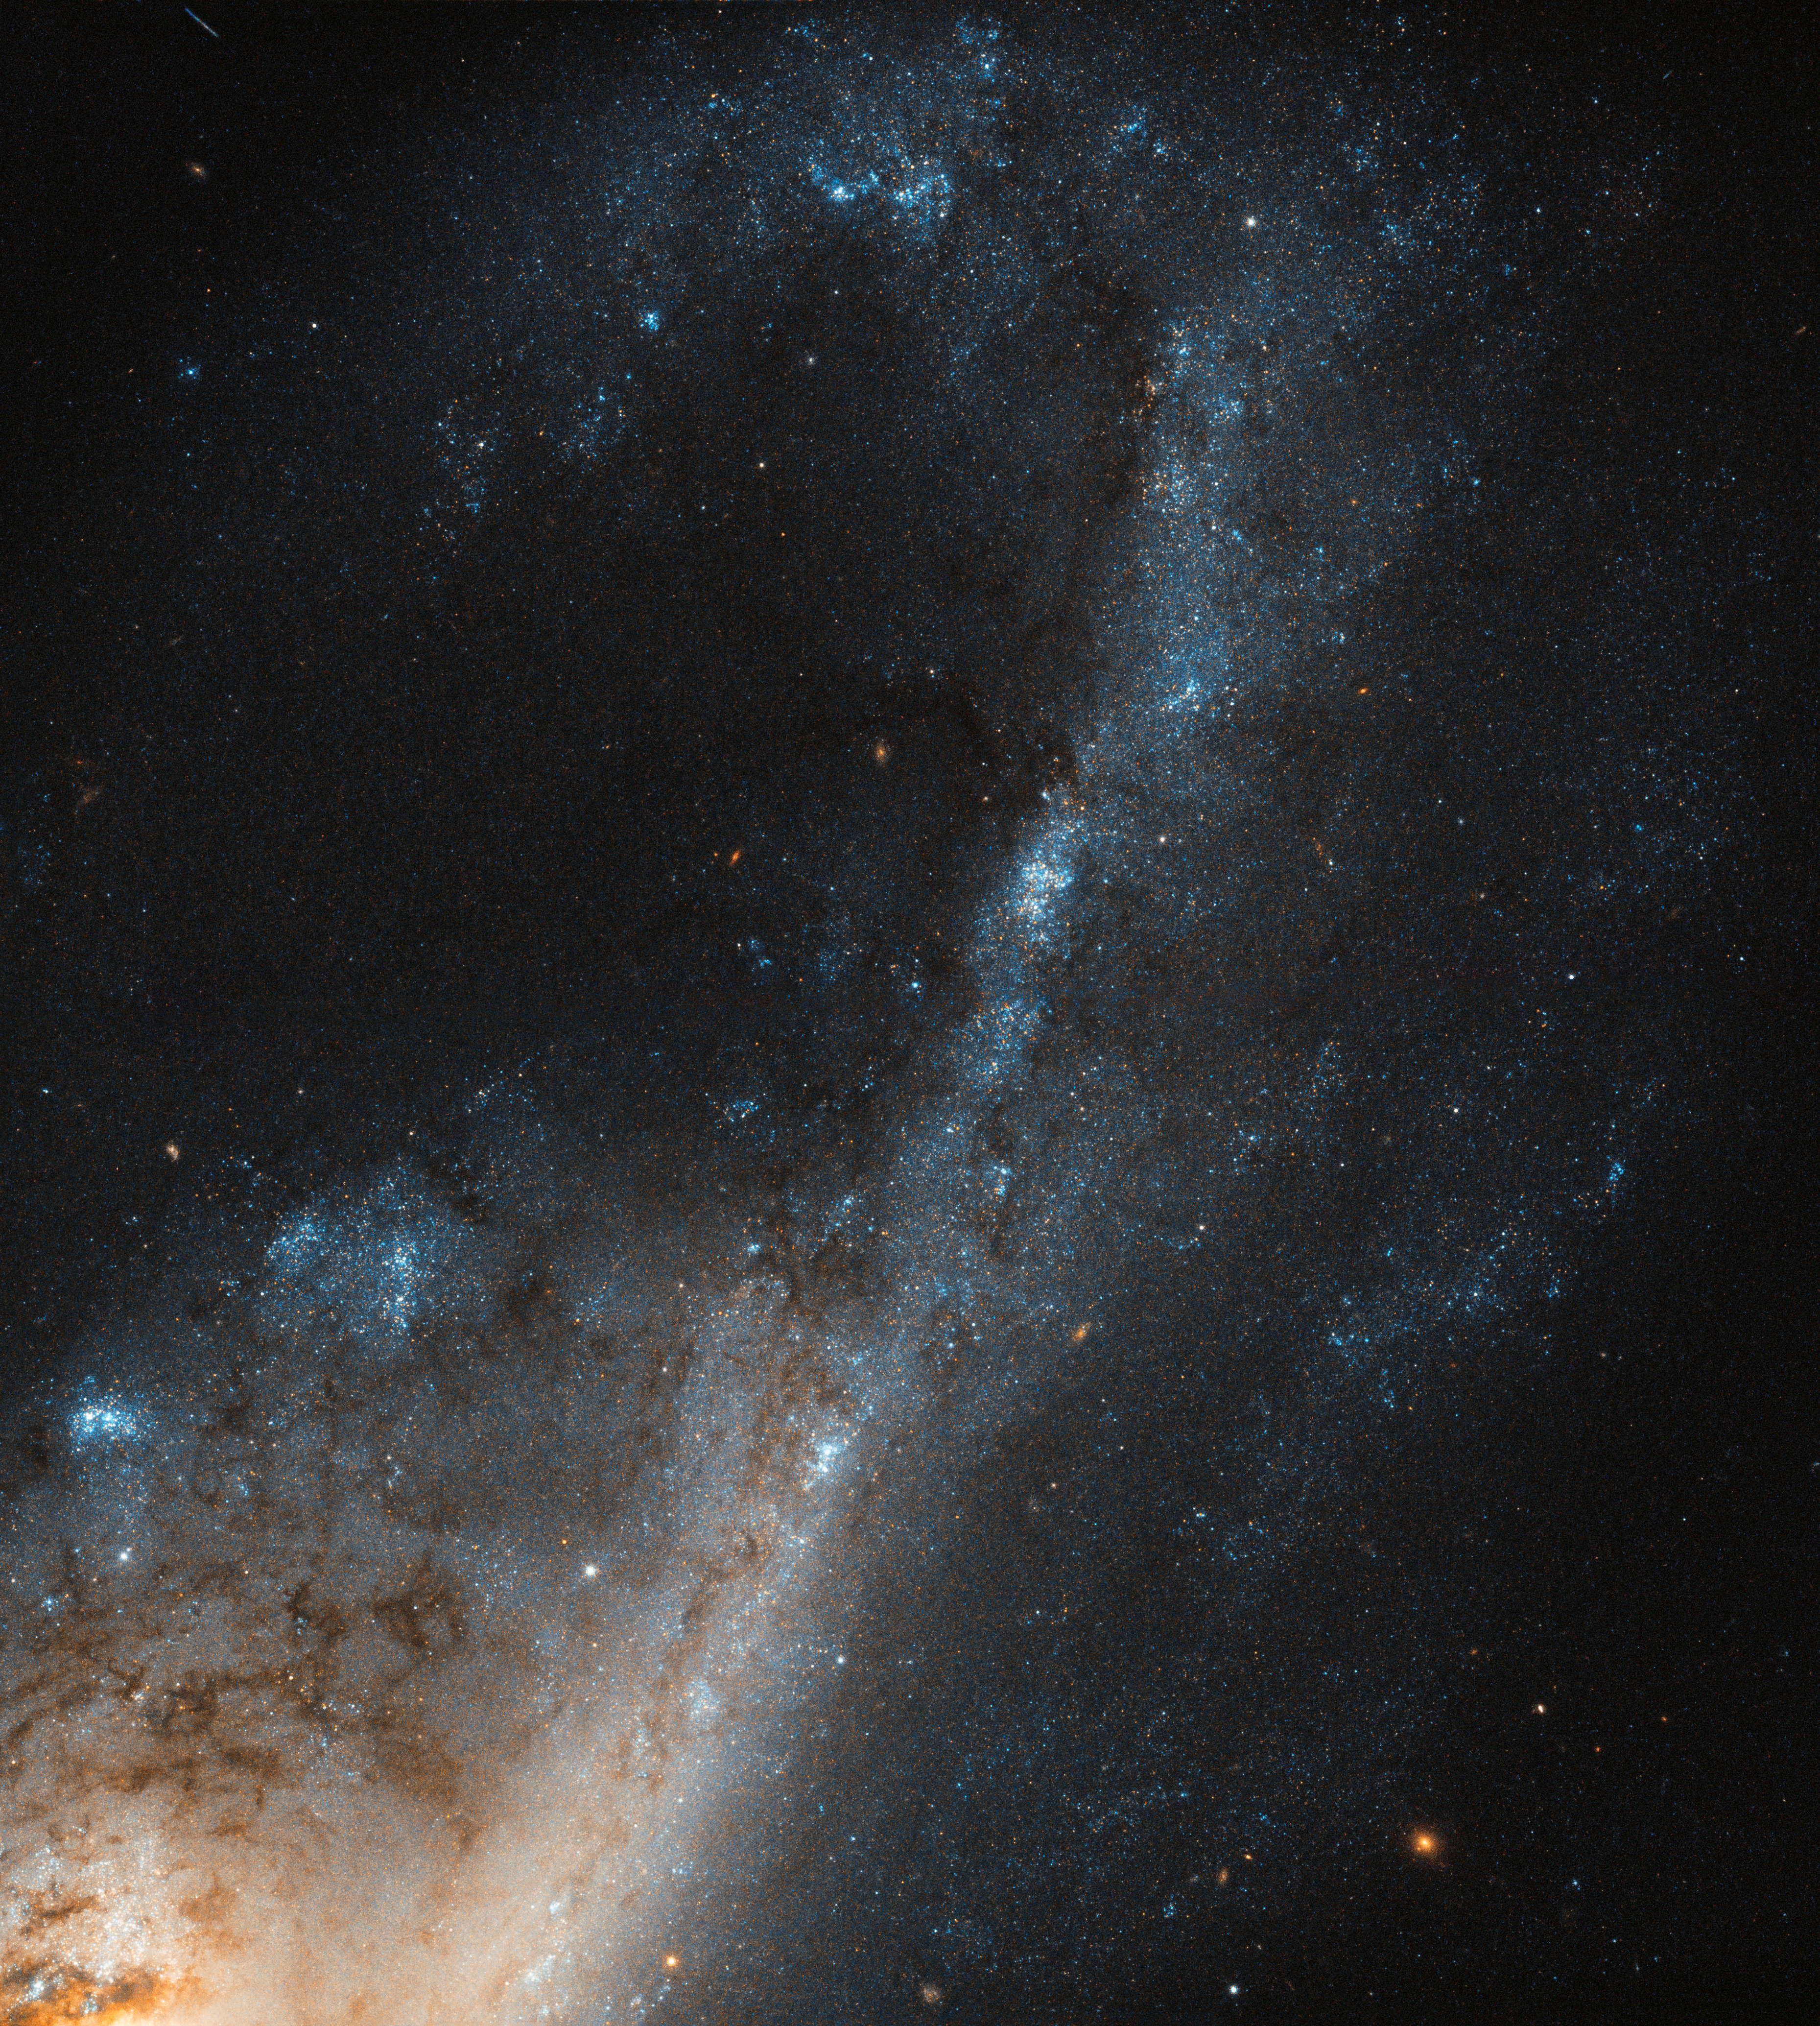

Starbursts in Virgo

Despite all efforts galaxy formation and evolution are still far from being fully understood. Fortunately, the conditions we see within certain galaxies — such as so-called starburst galaxies — can tell us a lot about how they have evolved over time. Starburst galaxies contain a region (or many regions) where stars are forming at such a breakneck rate that the galaxy is eating up its gas supply faster than it can be replenished!

NGC 4536 is such a galaxy, captured here in beautiful detail by the Hubble’s Wide Field Camera 3 (WFC3). Located roughly 50 million light-years away in the constellation of Virgo (The Virgin), it is a hub of extreme star formation. There are several different factors that can lead to such an ideal environment in which stars can form at such a rapid rate. Crucially, there has to be a sufficiently massive supply of gas. This might be acquired in a number of ways — for example by passing very close to another galaxy, in a full-blown galactic collision, or as a result of some event that forces lots of gas into a relatively small space.

Star formation leaves a few tell-tale fingerprints, so astronomers can tell where stars have been born. We know that starburst regions are rich in gas. Young stars in these extreme environments often live fast and die young, burning extremely hot and exhausting their gas supplies fairly quickly. These stars also emit huge amounts of intense ultraviolet light, which blasts the electrons off any atoms of hydrogen lurking nearby (a process called ionisation), leaving behind clouds of ionised hydrogen (known in astronomer-speak as HII regions).

Credit: ESA/Hubble & NASA